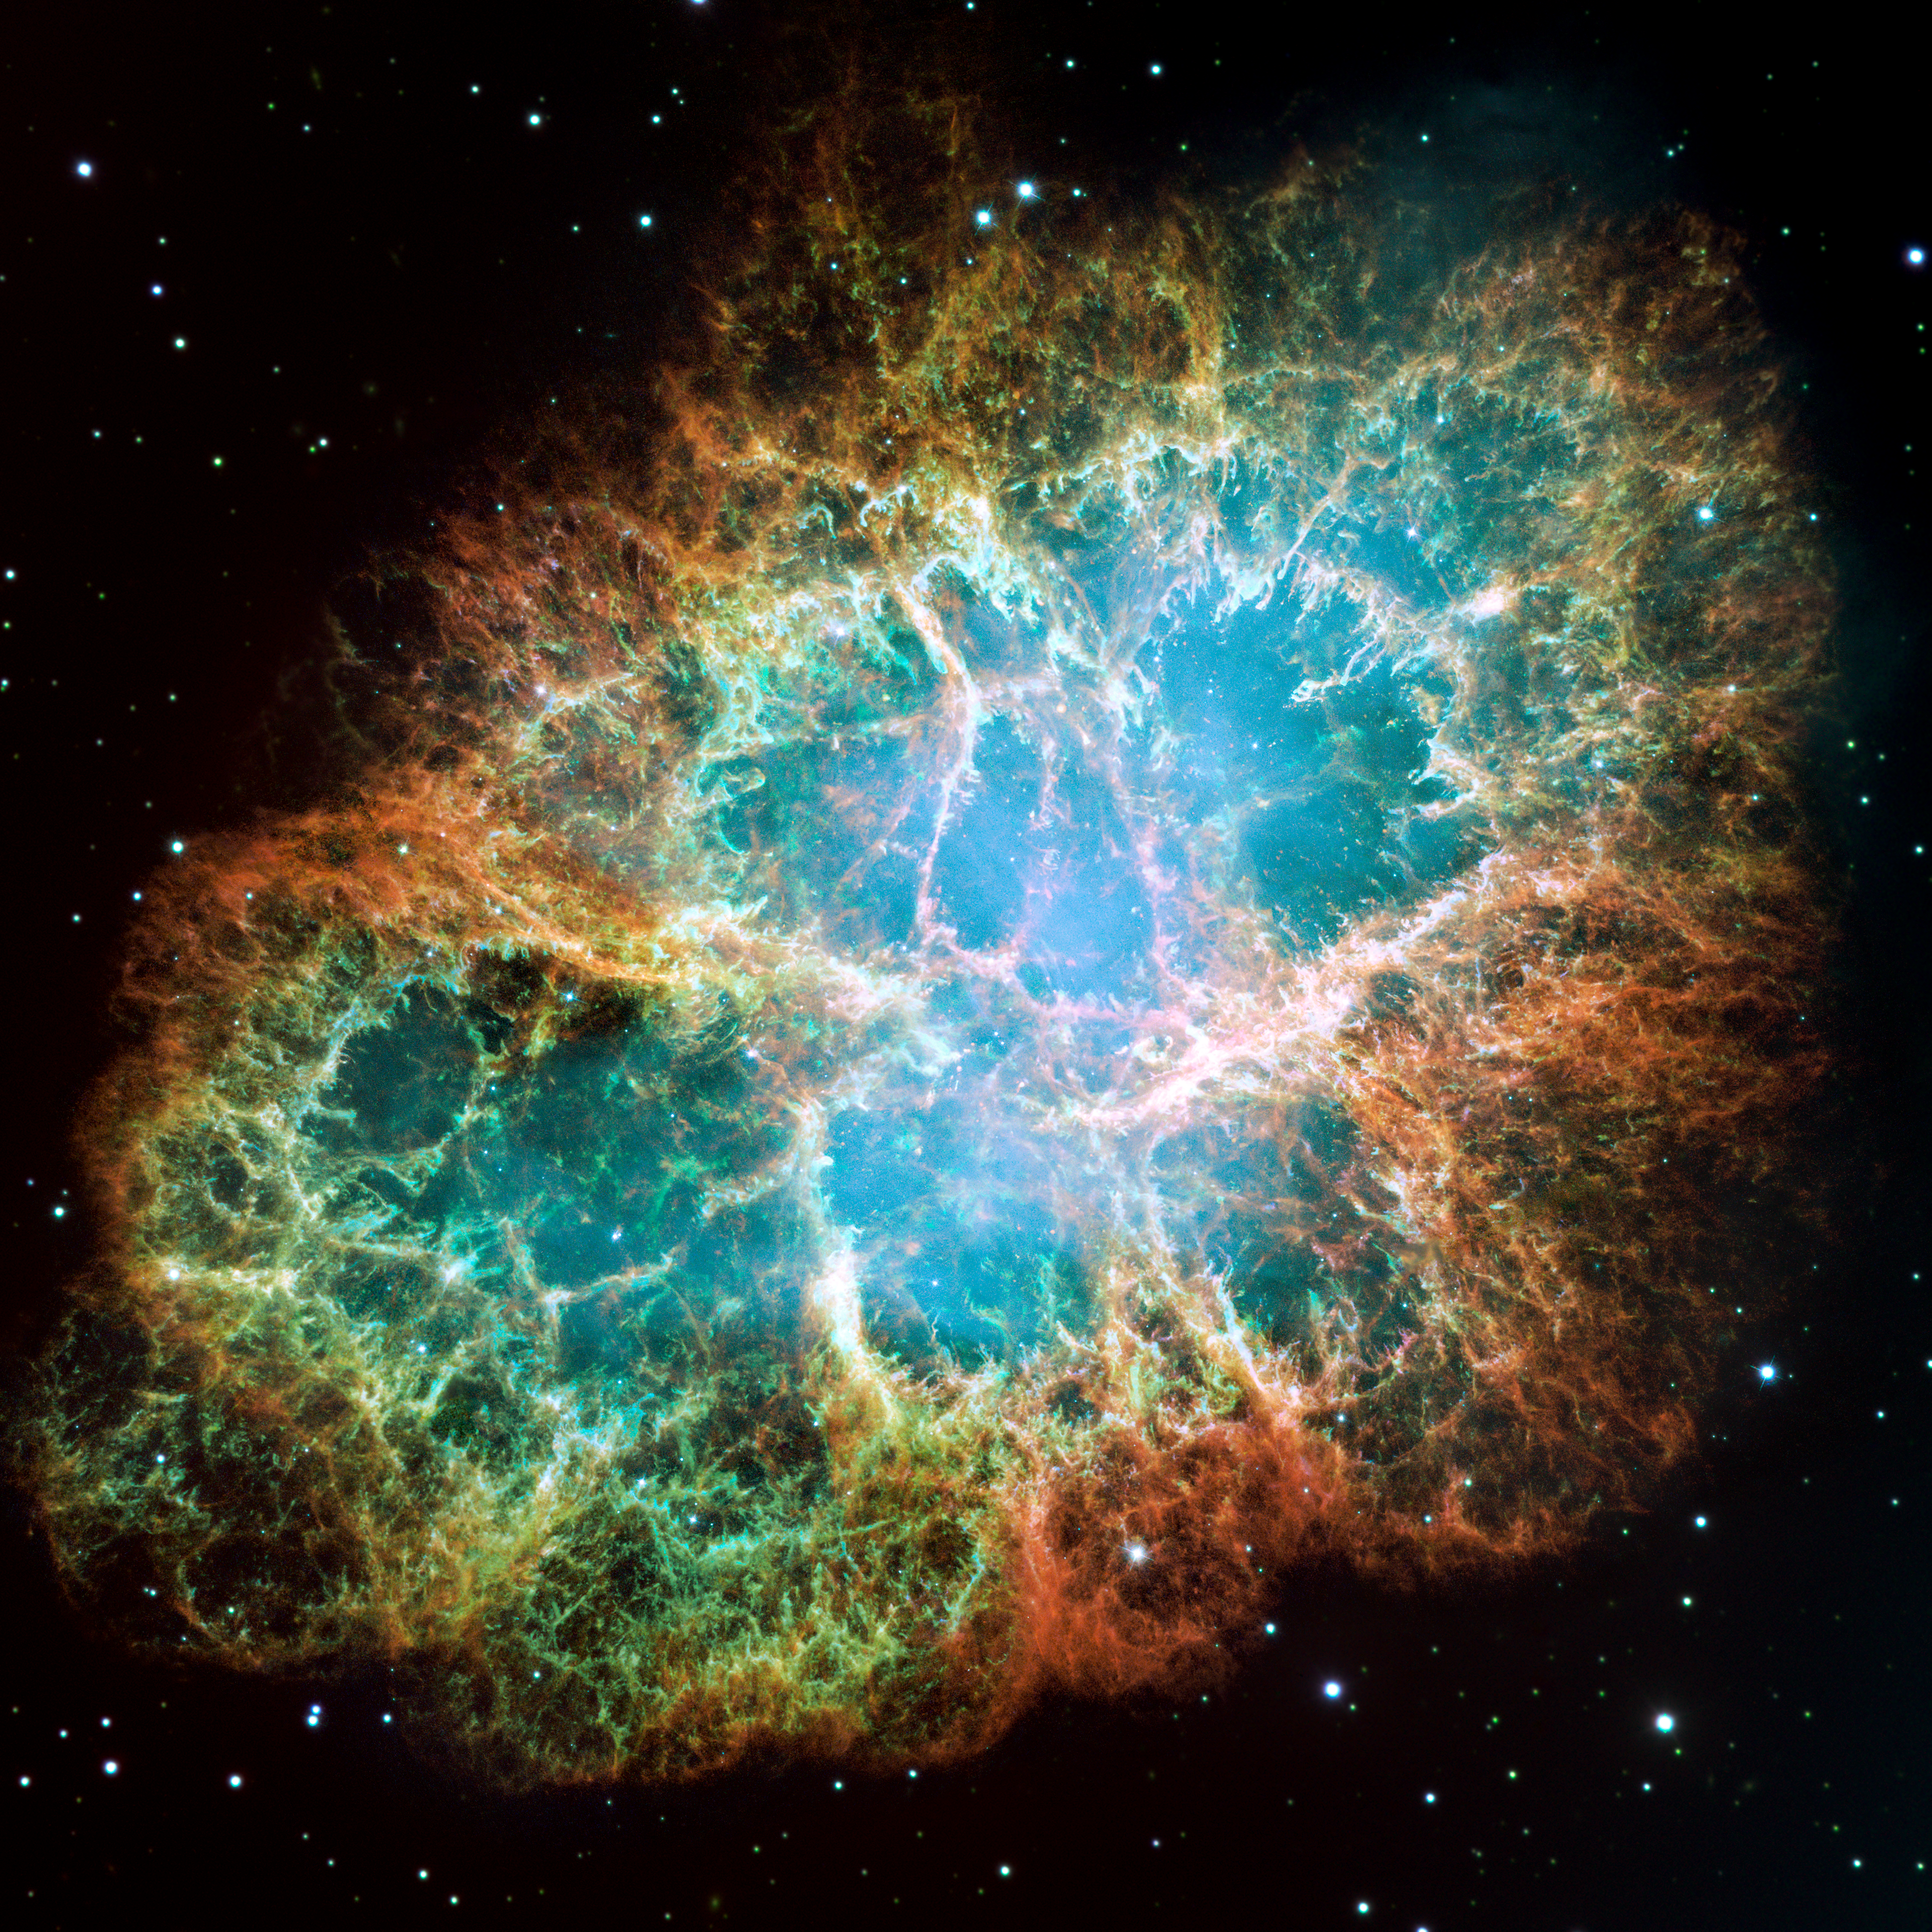

Most detailed image of the Crab Nebula

This Hubble image gives the most detailed view of the entire Crab Nebula ever. The Crab is among the most interesting and well studied objects in astronomy.

This image is the largest image ever taken with Hubble's WFPC2 camera. It was assembled from 24 individual exposures taken with the NASA/ESA Hubble Space Telescope and is the highest resolution image of the entire Crab Nebula ever made.

Credit: NASA, ESA and Allison Loll/Jeff Hester (Arizona State University). Acknowledgement: Davide De Martin (ESA/Hubble)